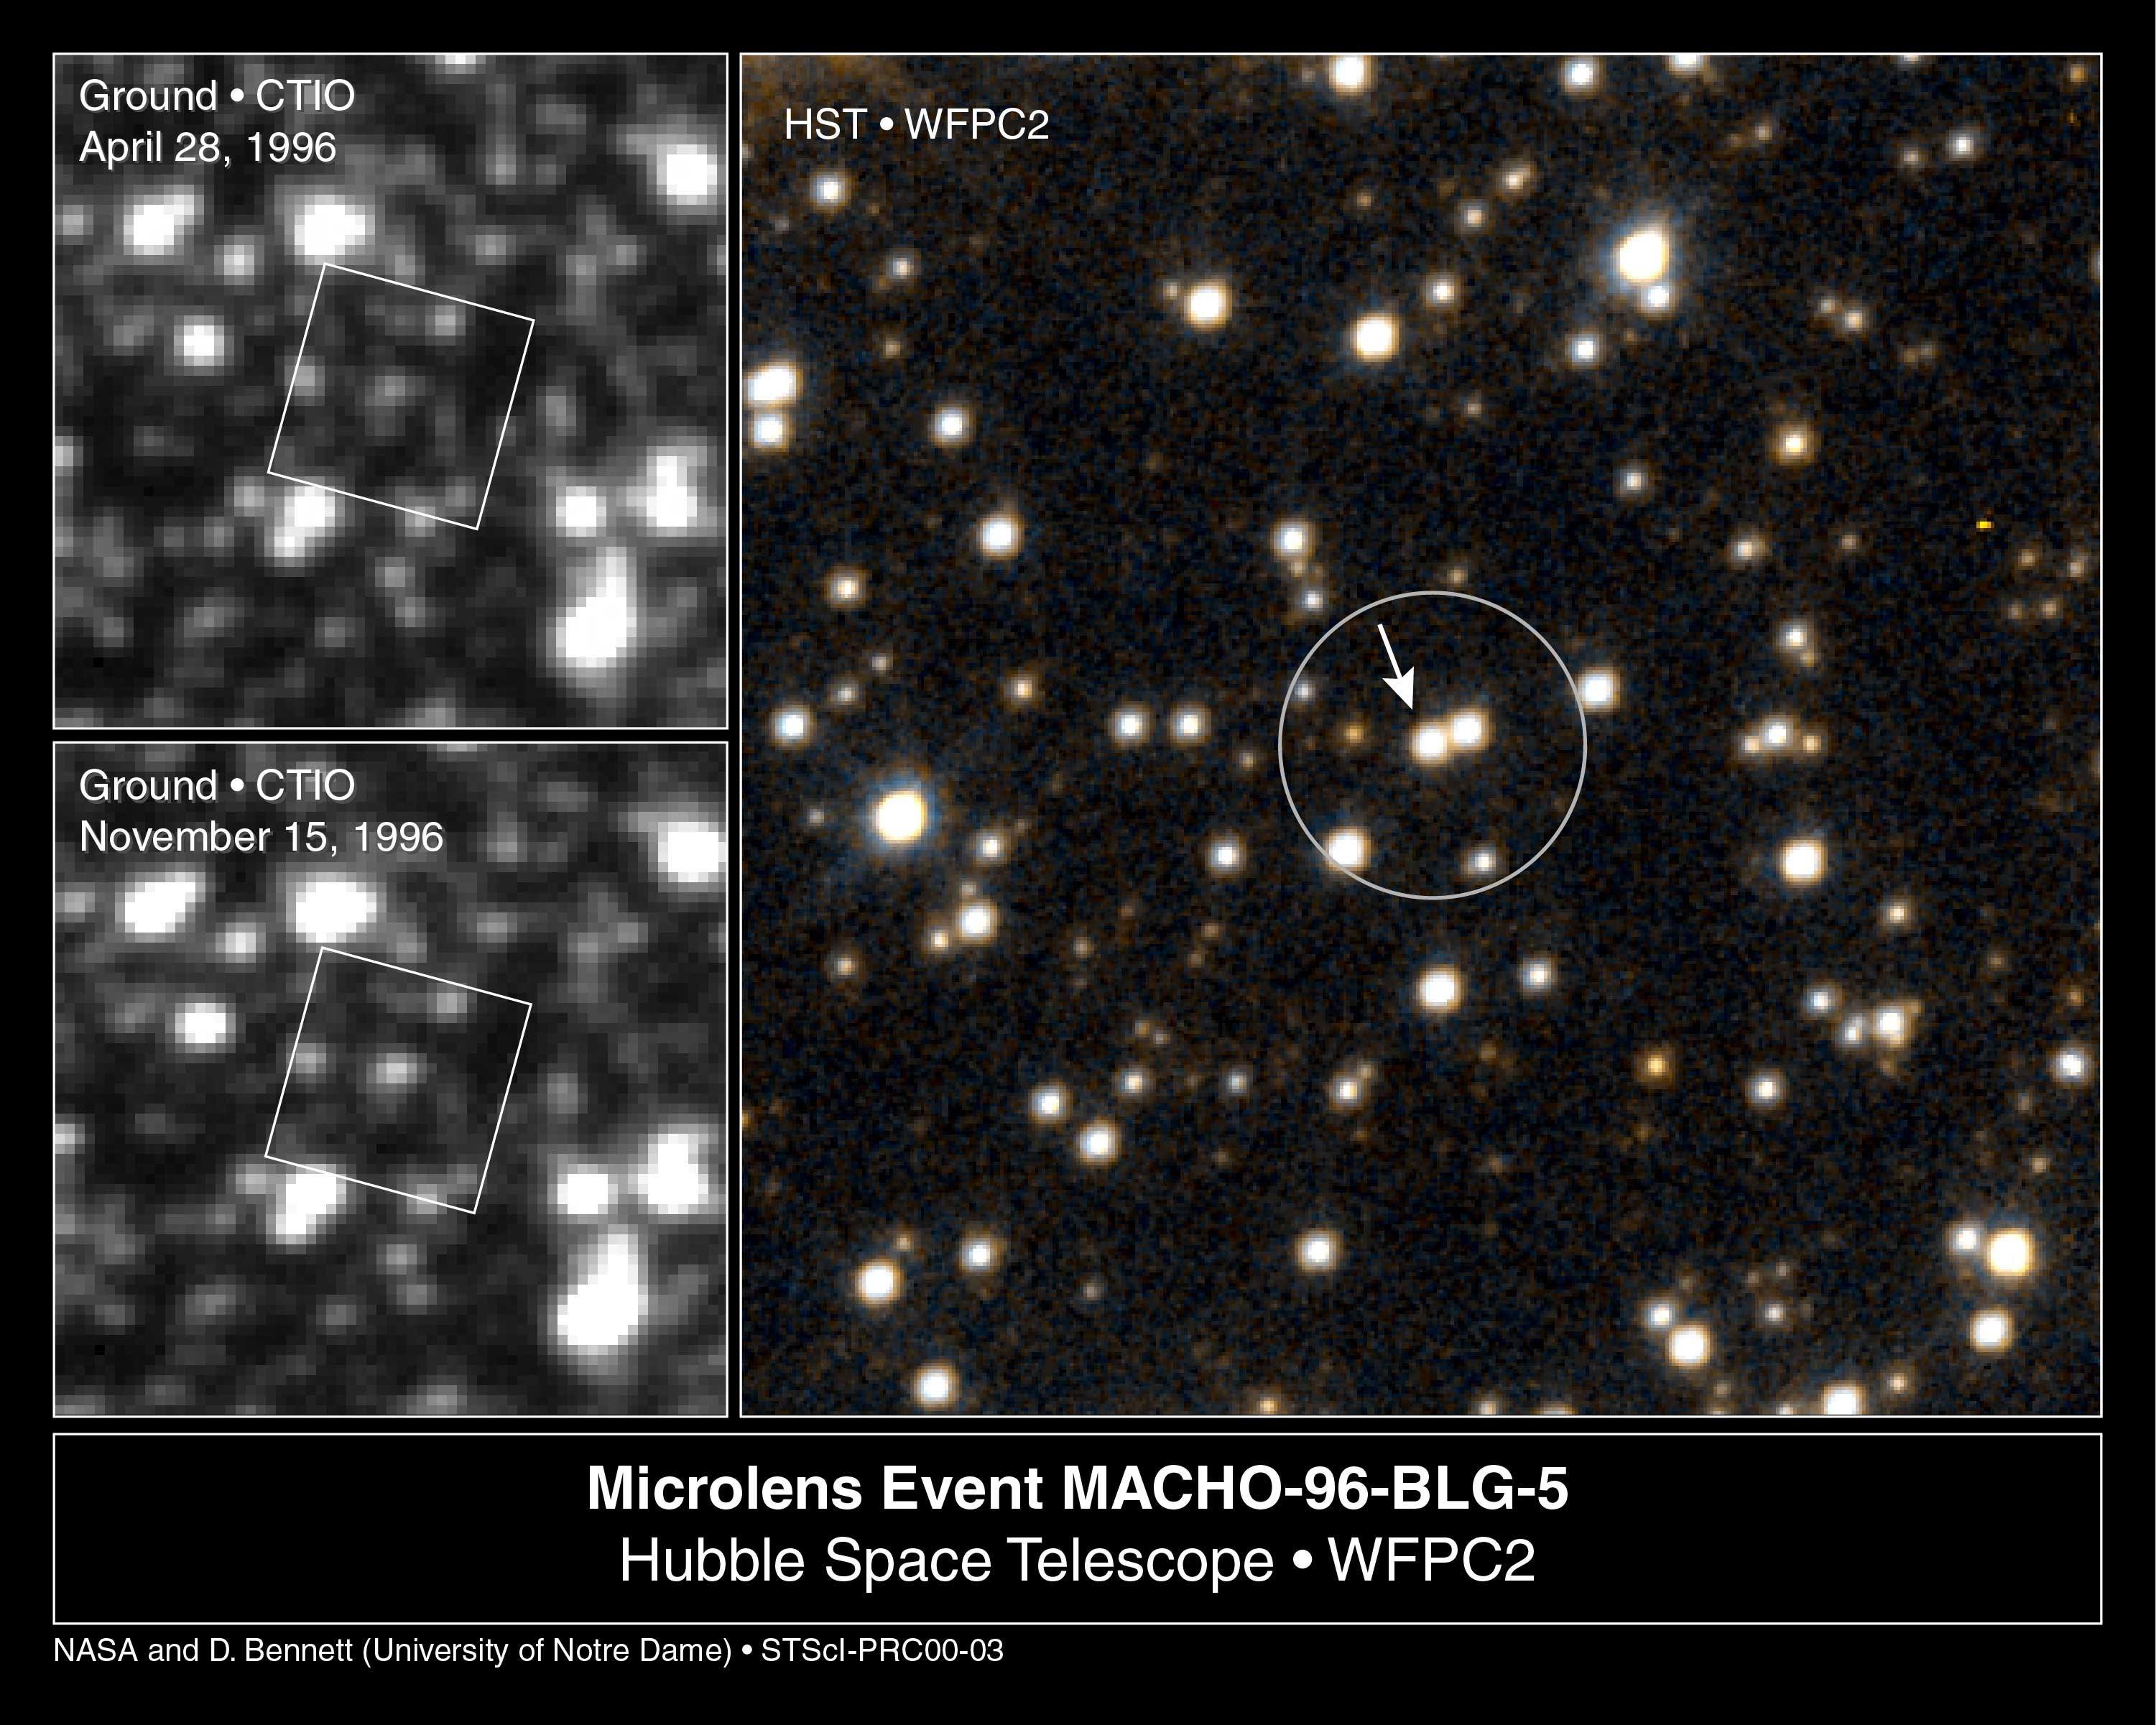

Lone Black Hole Passes in Front of Star (Hubble and Ground-Based Views)

Two international teams of astronomers using the Hubble Space Telescope and ground-based telescopes in Australia and Chile have discovered the first examples of isolated stellar-mass black holes adrift among the stars in our galaxy.

Credit: NASA/ESA and Dave Bennett (University of Notre Dame, Indiana)